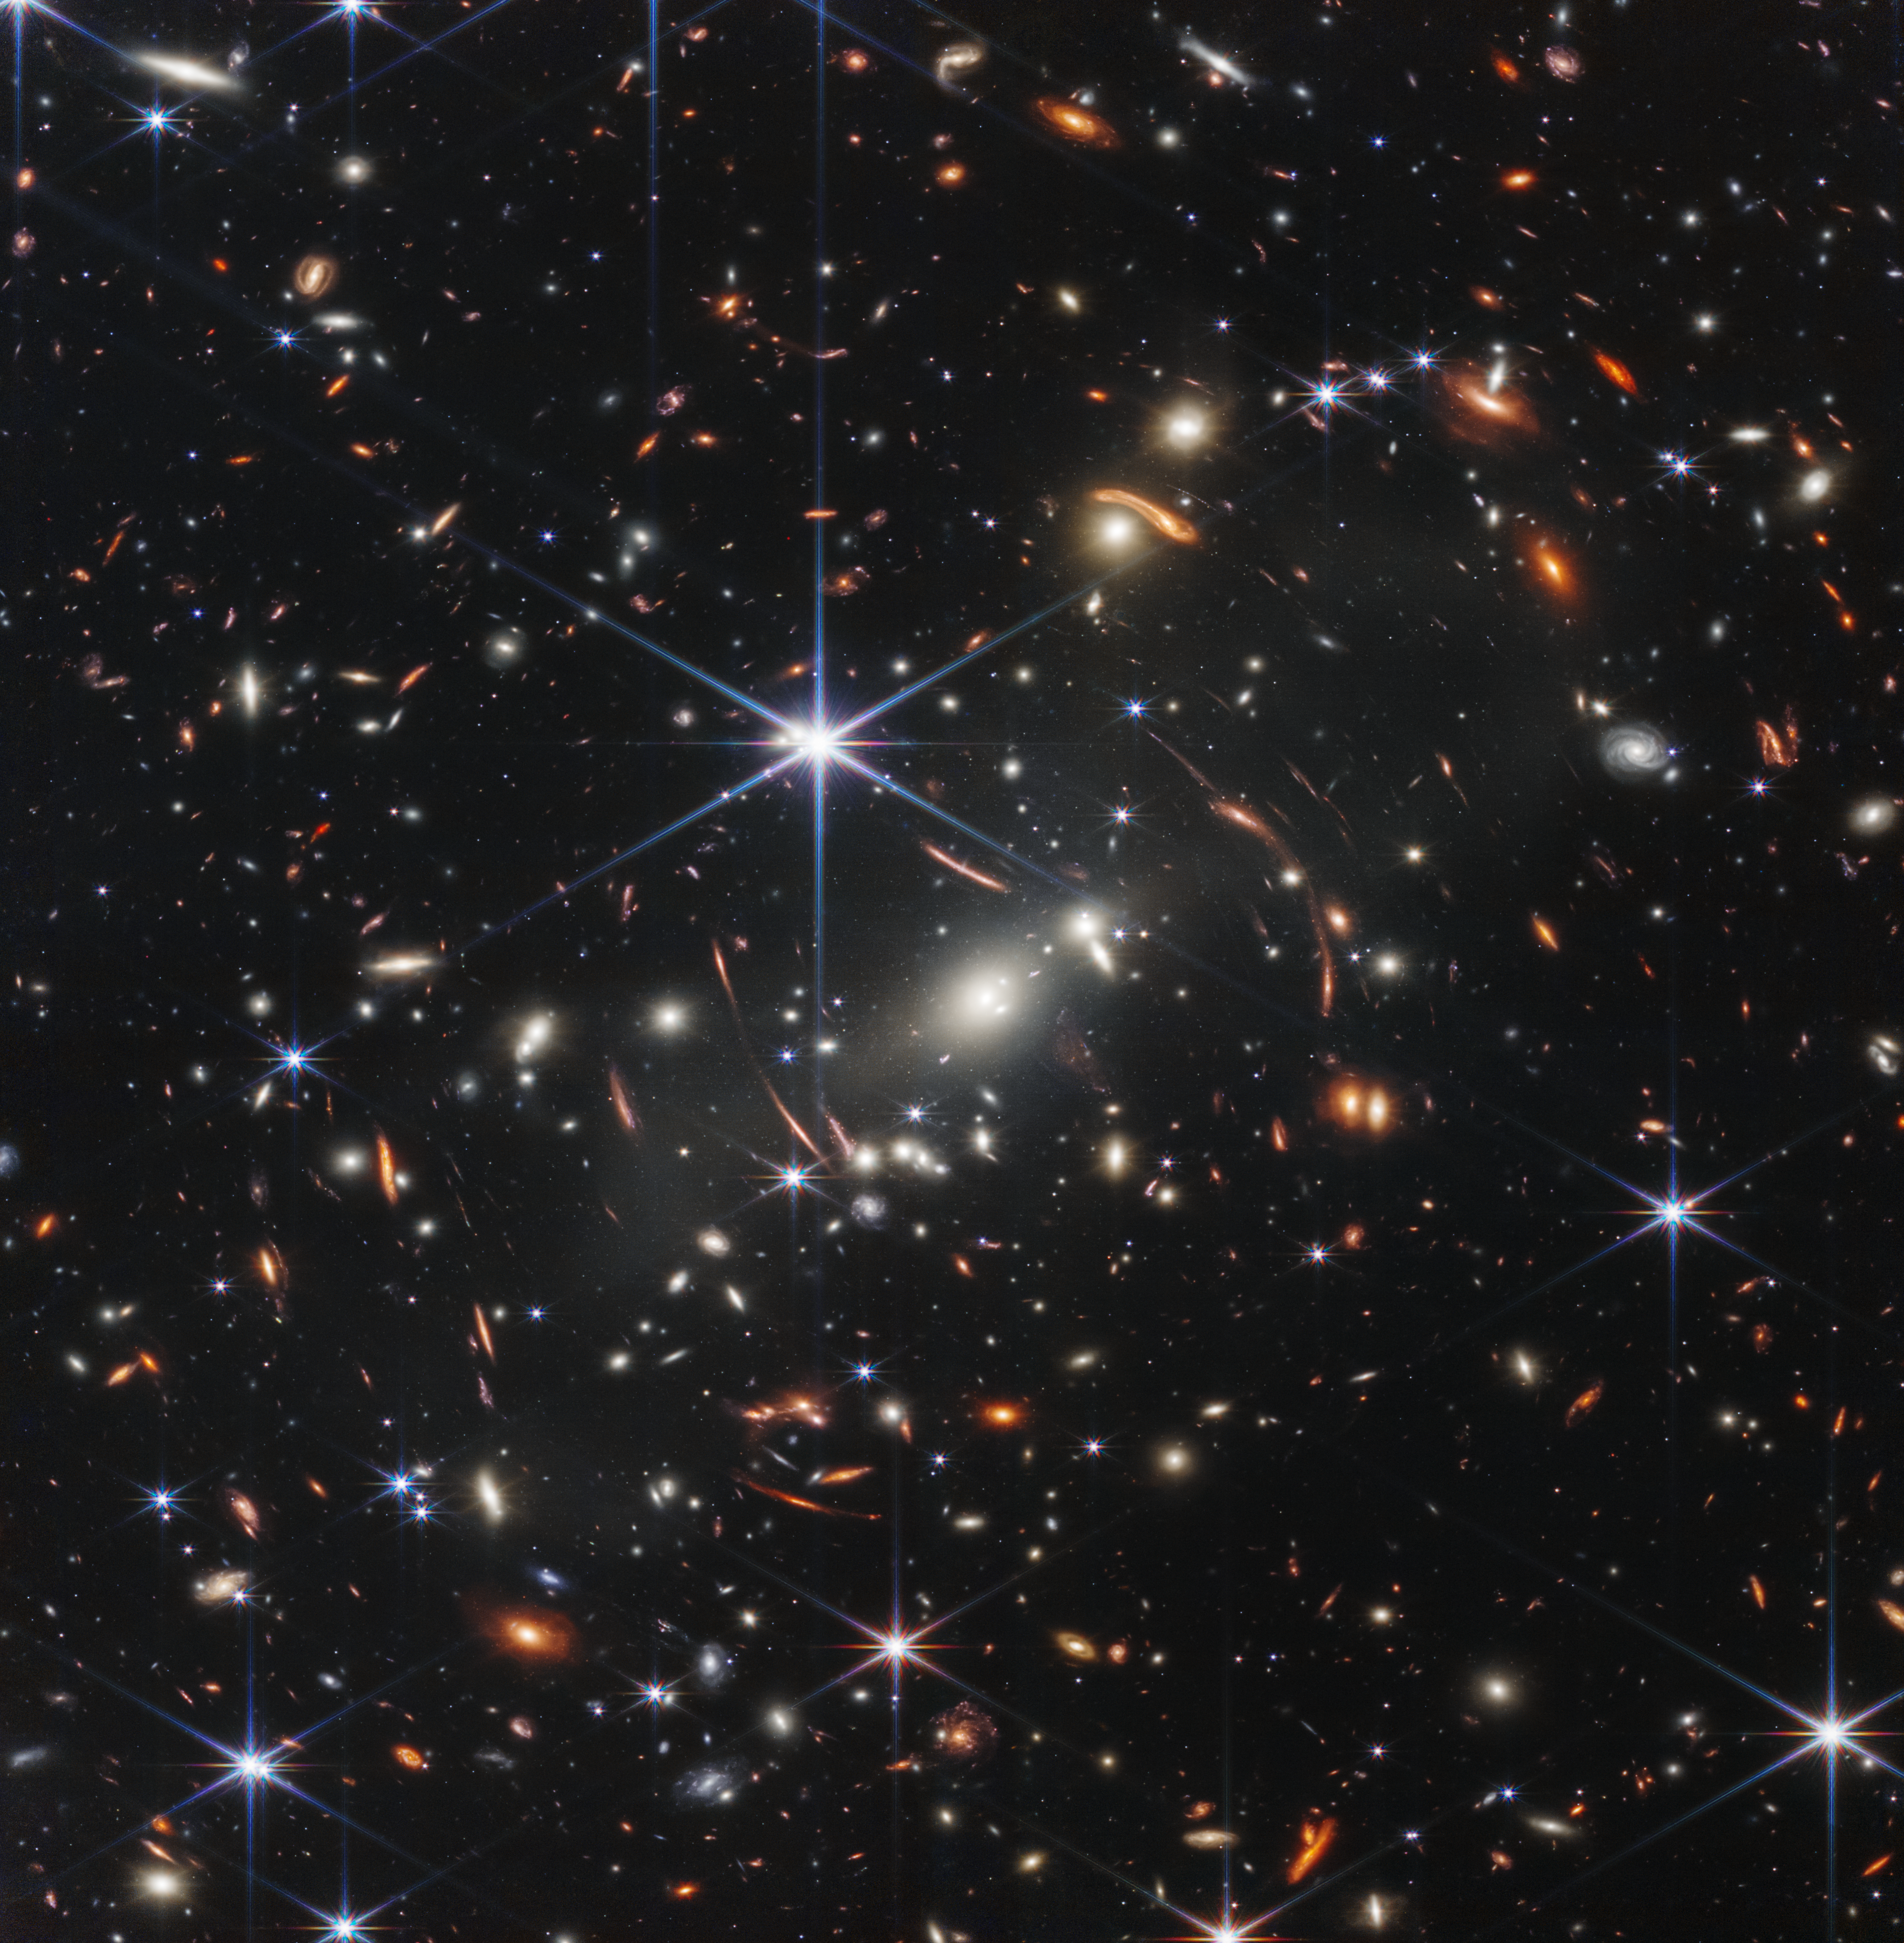

Webb’s First Deep Field (NIRCam Image)

Thousands of galaxies flood this near-infrared image of galaxy cluster SMACS 0723. High-resolution imaging from the NASA/ESA/CSA James Webb Space Telescope combined with a natural effect known as gravitational lensing made this finely detailed image possible.

First, focus on the galaxies responsible for the lensing: the bright white elliptical galaxy at the centre of the image and smaller white galaxies throughout the image. Bound together by gravity in a galaxy cluster, they are bending the light from galaxies that appear in the vast distances behind them. The combined mass of the galaxies and dark matter act as a cosmic telescope, creating magnified, contorted, and sometimes mirrored images of individual galaxies.

Clear examples of mirroring are found in the prominent orange arcs to the left and right of the brightest cluster galaxy. These are lensed galaxies – each individual galaxy is shown twice in one arc. Webb’s image has fully revealed their bright cores, which are filled with stars, along with orange star clusters along their edges.

Not all galaxies in this field are mirrored – some are stretched. Others appear scattered by interactions with other galaxies, leaving trails of stars behind them.

Webb has refined the level of detail we can observe throughout this field. Very diffuse galaxies appear like collections of loosely bound dandelion seeds aloft in a breeze. Individual “pods” of star formation practically bloom within some of the most distant galaxies – the clearest, most detailed views of star clusters in the early universe so far.

One galaxy speckled with star clusters appears near the bottom end of the bright central star’s vertical diffraction spike – just to the right of a long orange arc. The long, thin ladybug-like galaxy is flecked with pockets of star formation. Draw a line between its “wings” to roughly match up its star clusters, mirrored top to bottom. Because this galaxy is so magnified and its individual star clusters are so crisp, researchers will be able to study it in exquisite detail, which wasn’t previously possible for galaxies this distant.

The galaxies in this scene that are farthest away – the tiniest galaxies that are located well behind the cluster – look nothing like the spiral and elliptical galaxies observed in the local universe. They are much clumpier and more irregular. Webb’s highly detailed image may help researchers measure the ages and masses of star clusters within these distant galaxies. This might lead to more accurate models of galaxies that existed at cosmic “spring,” when galaxies were sprouting tiny “buds” of new growth, actively interacting and merging, and had yet to develop into larger spirals. Ultimately, Webb’s upcoming observations will help astronomers better understand how galaxies form and grow in the early universe.

For a full array of Webb’s first images and spectra, including downloadable files, please visit: https://esawebb.org/initiatives/webbs-first-images/

NIRCam was built by a team at the University of Arizona and Lockheed Martin’s Advanced Technology Center.

Credit: NASA, ESA, CSA, and STScI